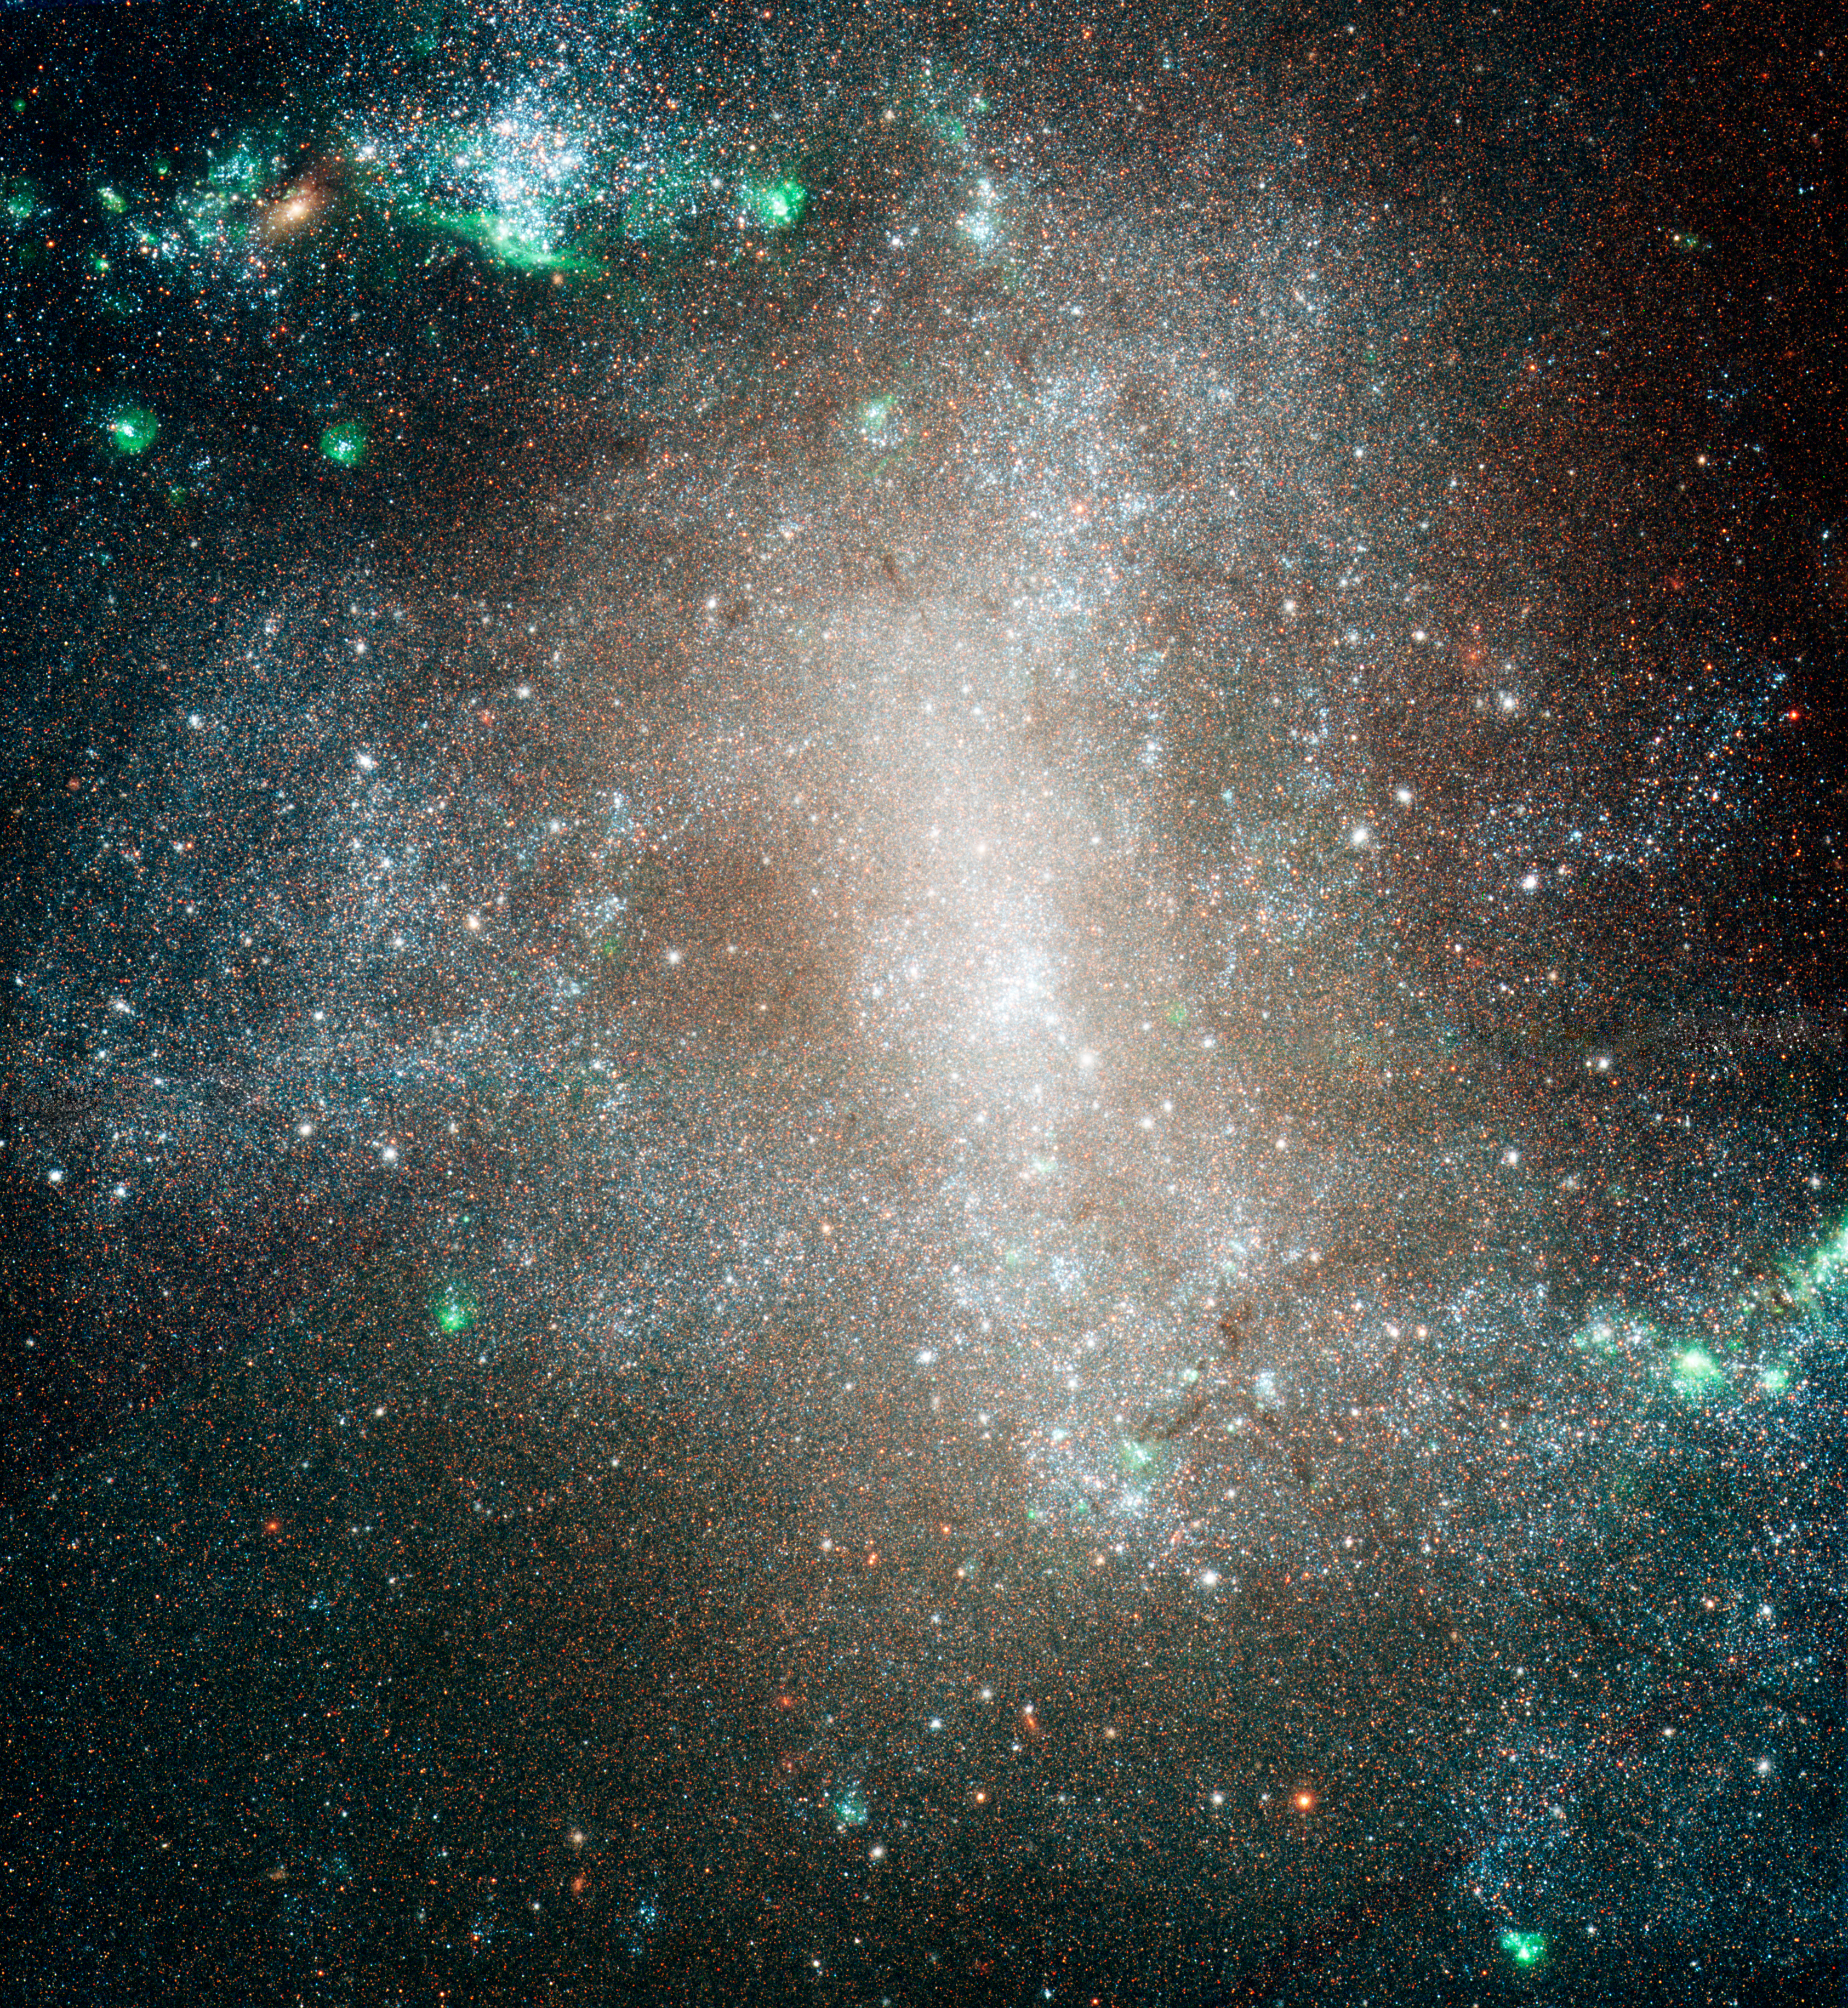

Barred Spiral Galaxy NGC 1313 - HST

This is a NASA/ESA Hubble Space Telescope image of the central region of the barred spiral galaxy NGC 1313. Hubble was used to resolve stars within the galaxy to do a census of various classes of stars distributed across the galaxy. The observations show that hot blue stars (of class B) are widely scattered across the galaxy. This is evidence of "infant mortality" in which the young, so-called open clusters where stars are born, quickly became gravitationally "unglued" and scattered their resident stars into the galaxy. NGC 1313 is 50,000 light-years across and lies 14 million light-years away in the southern constellation of Reticulum.

Credit: NASA, ESA and A. Pellerin (STScI)